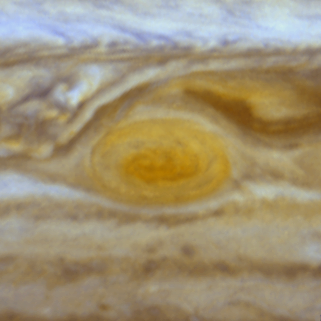

Jupiter's Great Red Spot

When 17th-century astronomers first turned their telescopes to Jupiter, they noted a conspicuous reddish spot on the giant planet. This Great Red Spot is still present in Jupiter's atmosphere, more than 300 years later. It is now known that it is a vast storm, spinning like a cyclone. Unlike a low-pressure hurricane in the Caribbean Sea, however, the Red Spot rotates in a counterclockwise direction in the southern hemisphere, showing that it is a high-pressure system. Winds inside this Jovian storm reach speeds of about 270 mph.

Credit: Hubble Heritage Team (STScI/AURA/NASA/ESA) and Amy Simon (Cornell U.)